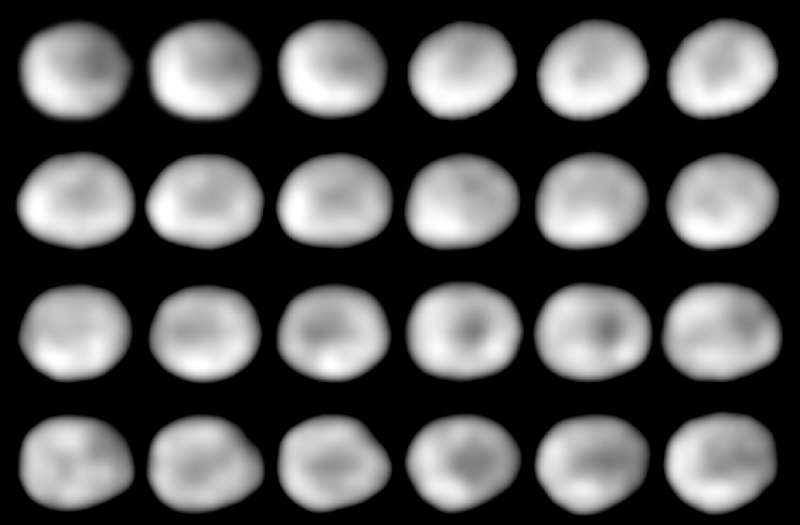

Rotation of the Asteroid Vesta

This is a Hubble Space Telescope series of 24 images showing the full 5.34-hour rotation of the 325-mile diameter (525 kilometer) asteroid Vesta.

Credit: B. Zellner (Georgia Southern University) and NASA/ESA